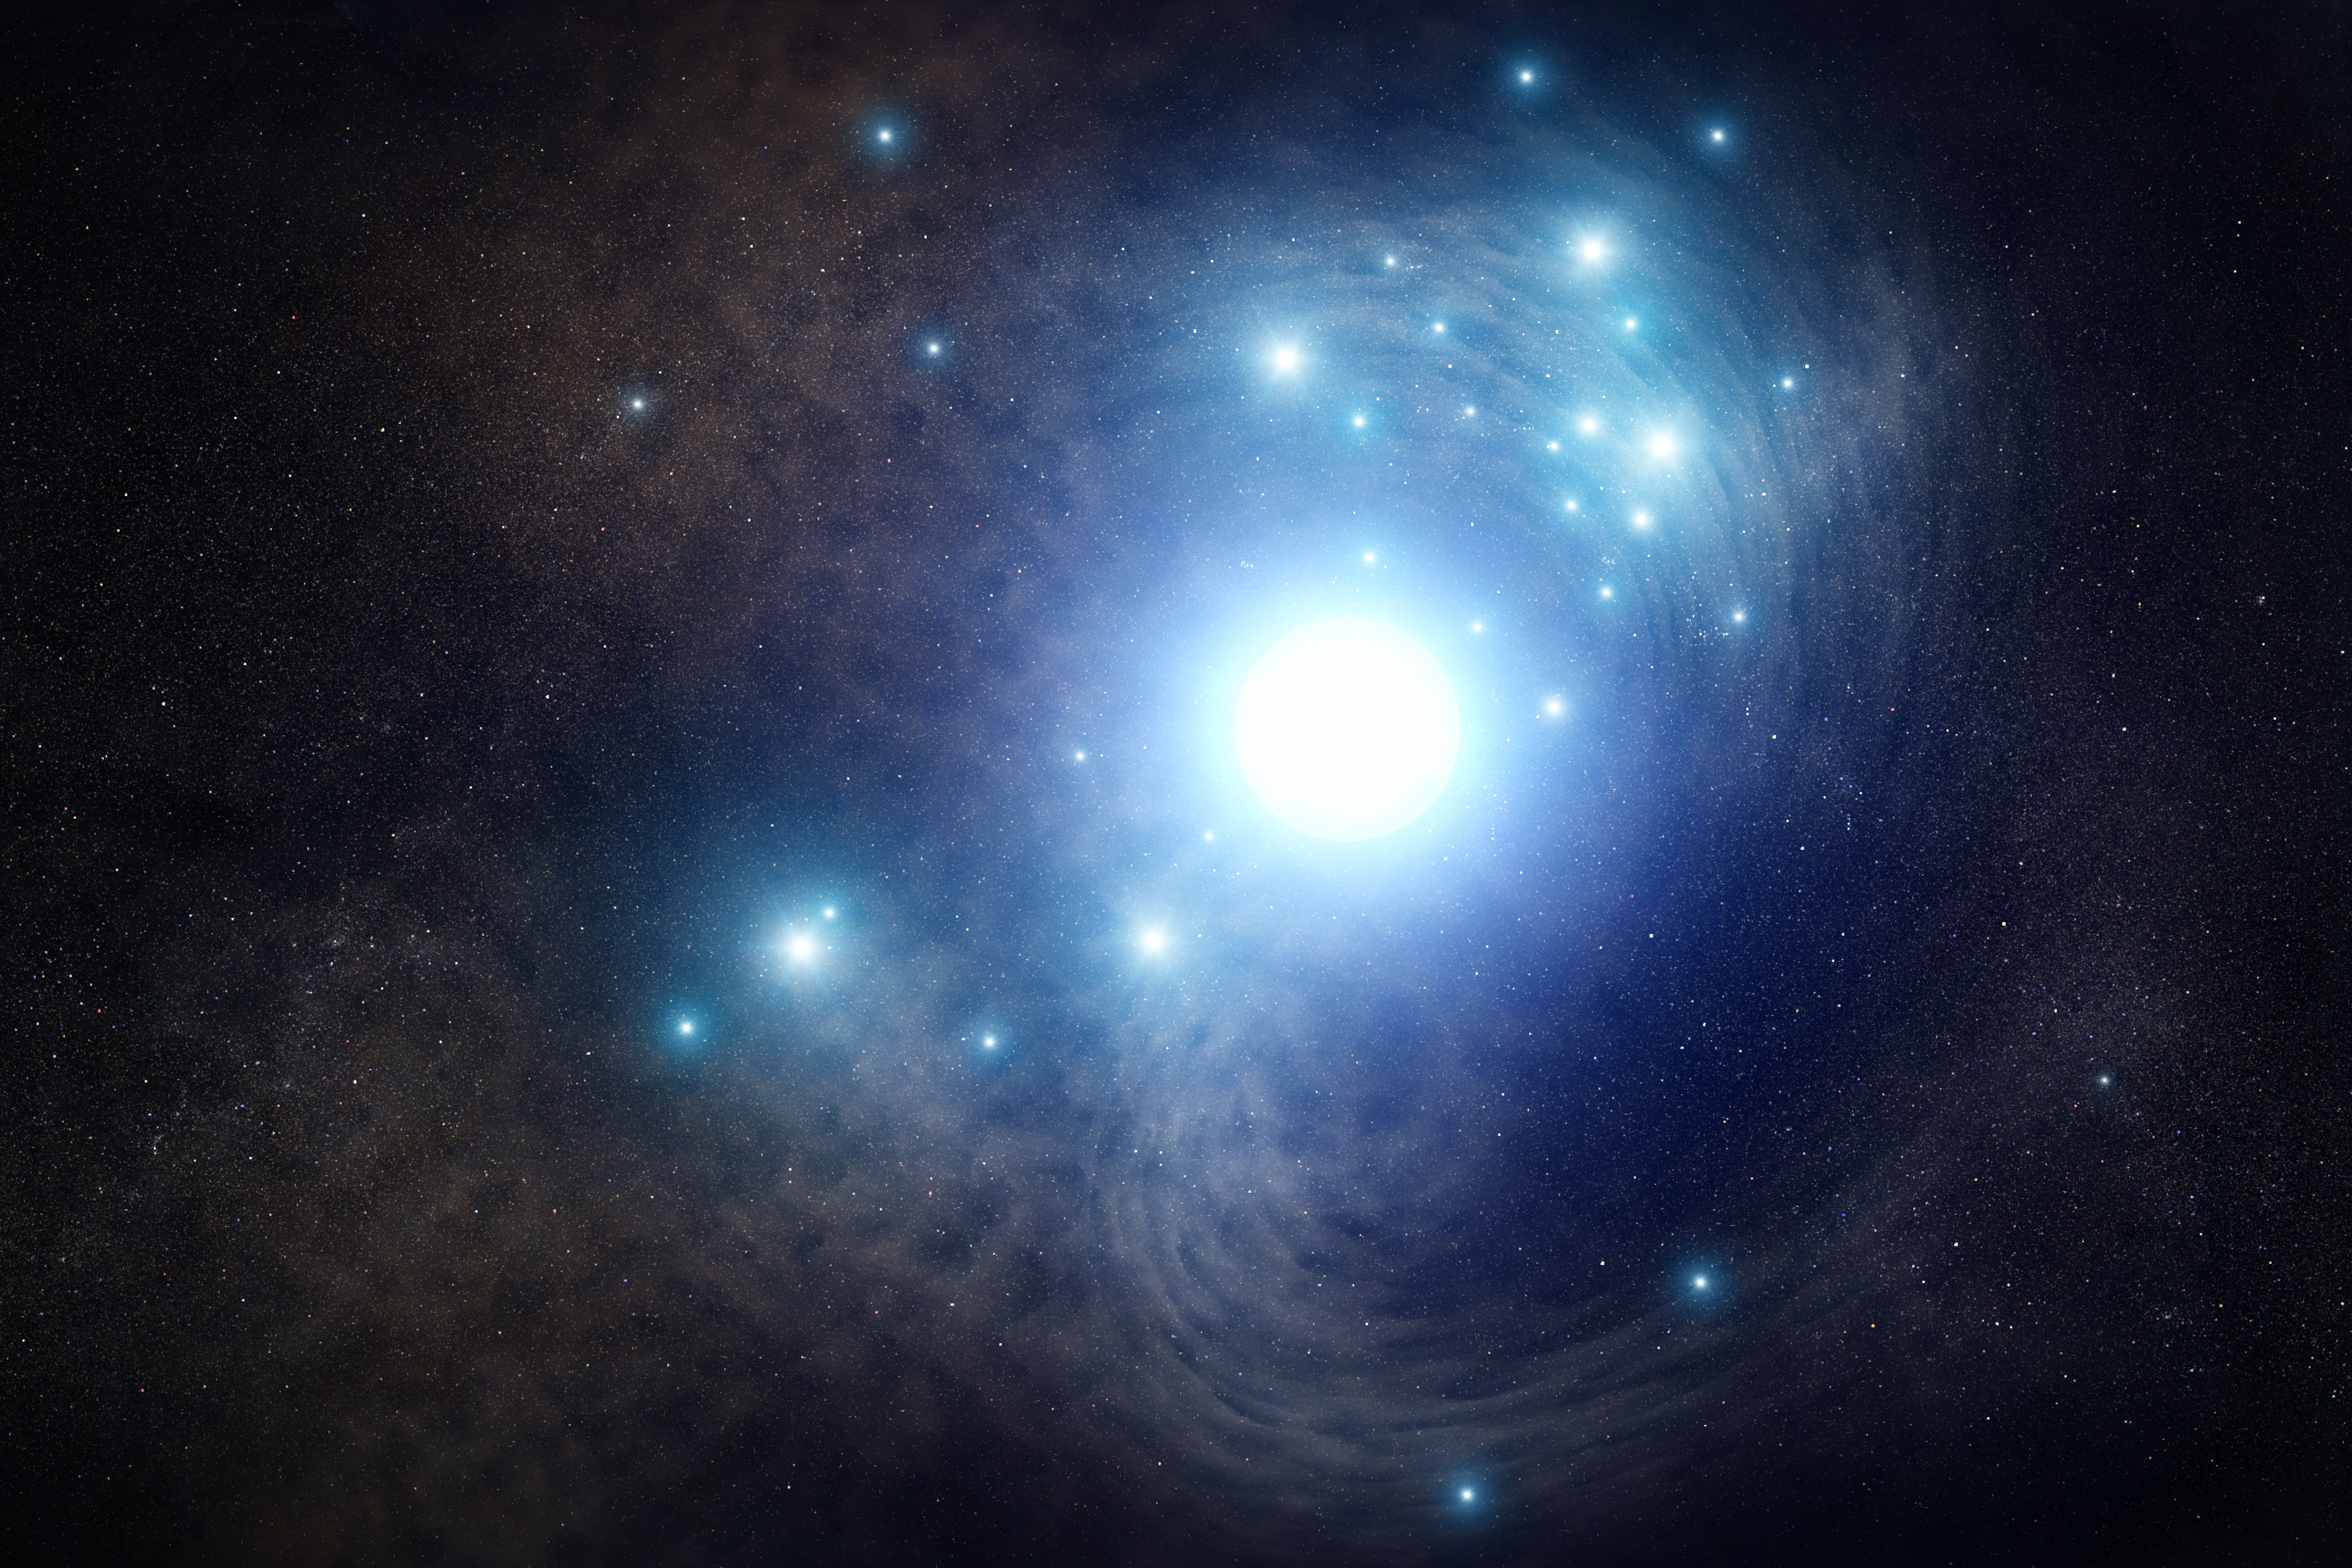

Artist's impression of progenitor star to a type Ic supernova

This is an artist's impression of a blue supergiant star that once existed inside a cluster of young stars in the spiral galaxy NGC 3938, located 65 million light-years away. It exploded as a supernova in 2017, and NASA/ESA Hubble Space Telescope archival photos were used to locate the doomed progenitor star, as it looked in 2007.

The star may have been 50 as massive as our Sun and burned at a furious rate, making it hotter and bluer than our Sun. It was so hot, it had lost its outer layers of hydrogen and helium. When it exploded in 2017, astronomers categorised it as a Type Ic supernova because of the lack of hydrogen and helium in the supernova's spectrum.

In an alternative scenario (not shown here) a binary companion to the massive star may have stripped off its hydrogen and helium layers.

Credit: NASA, ESA, and J. Olmsted (STScI)